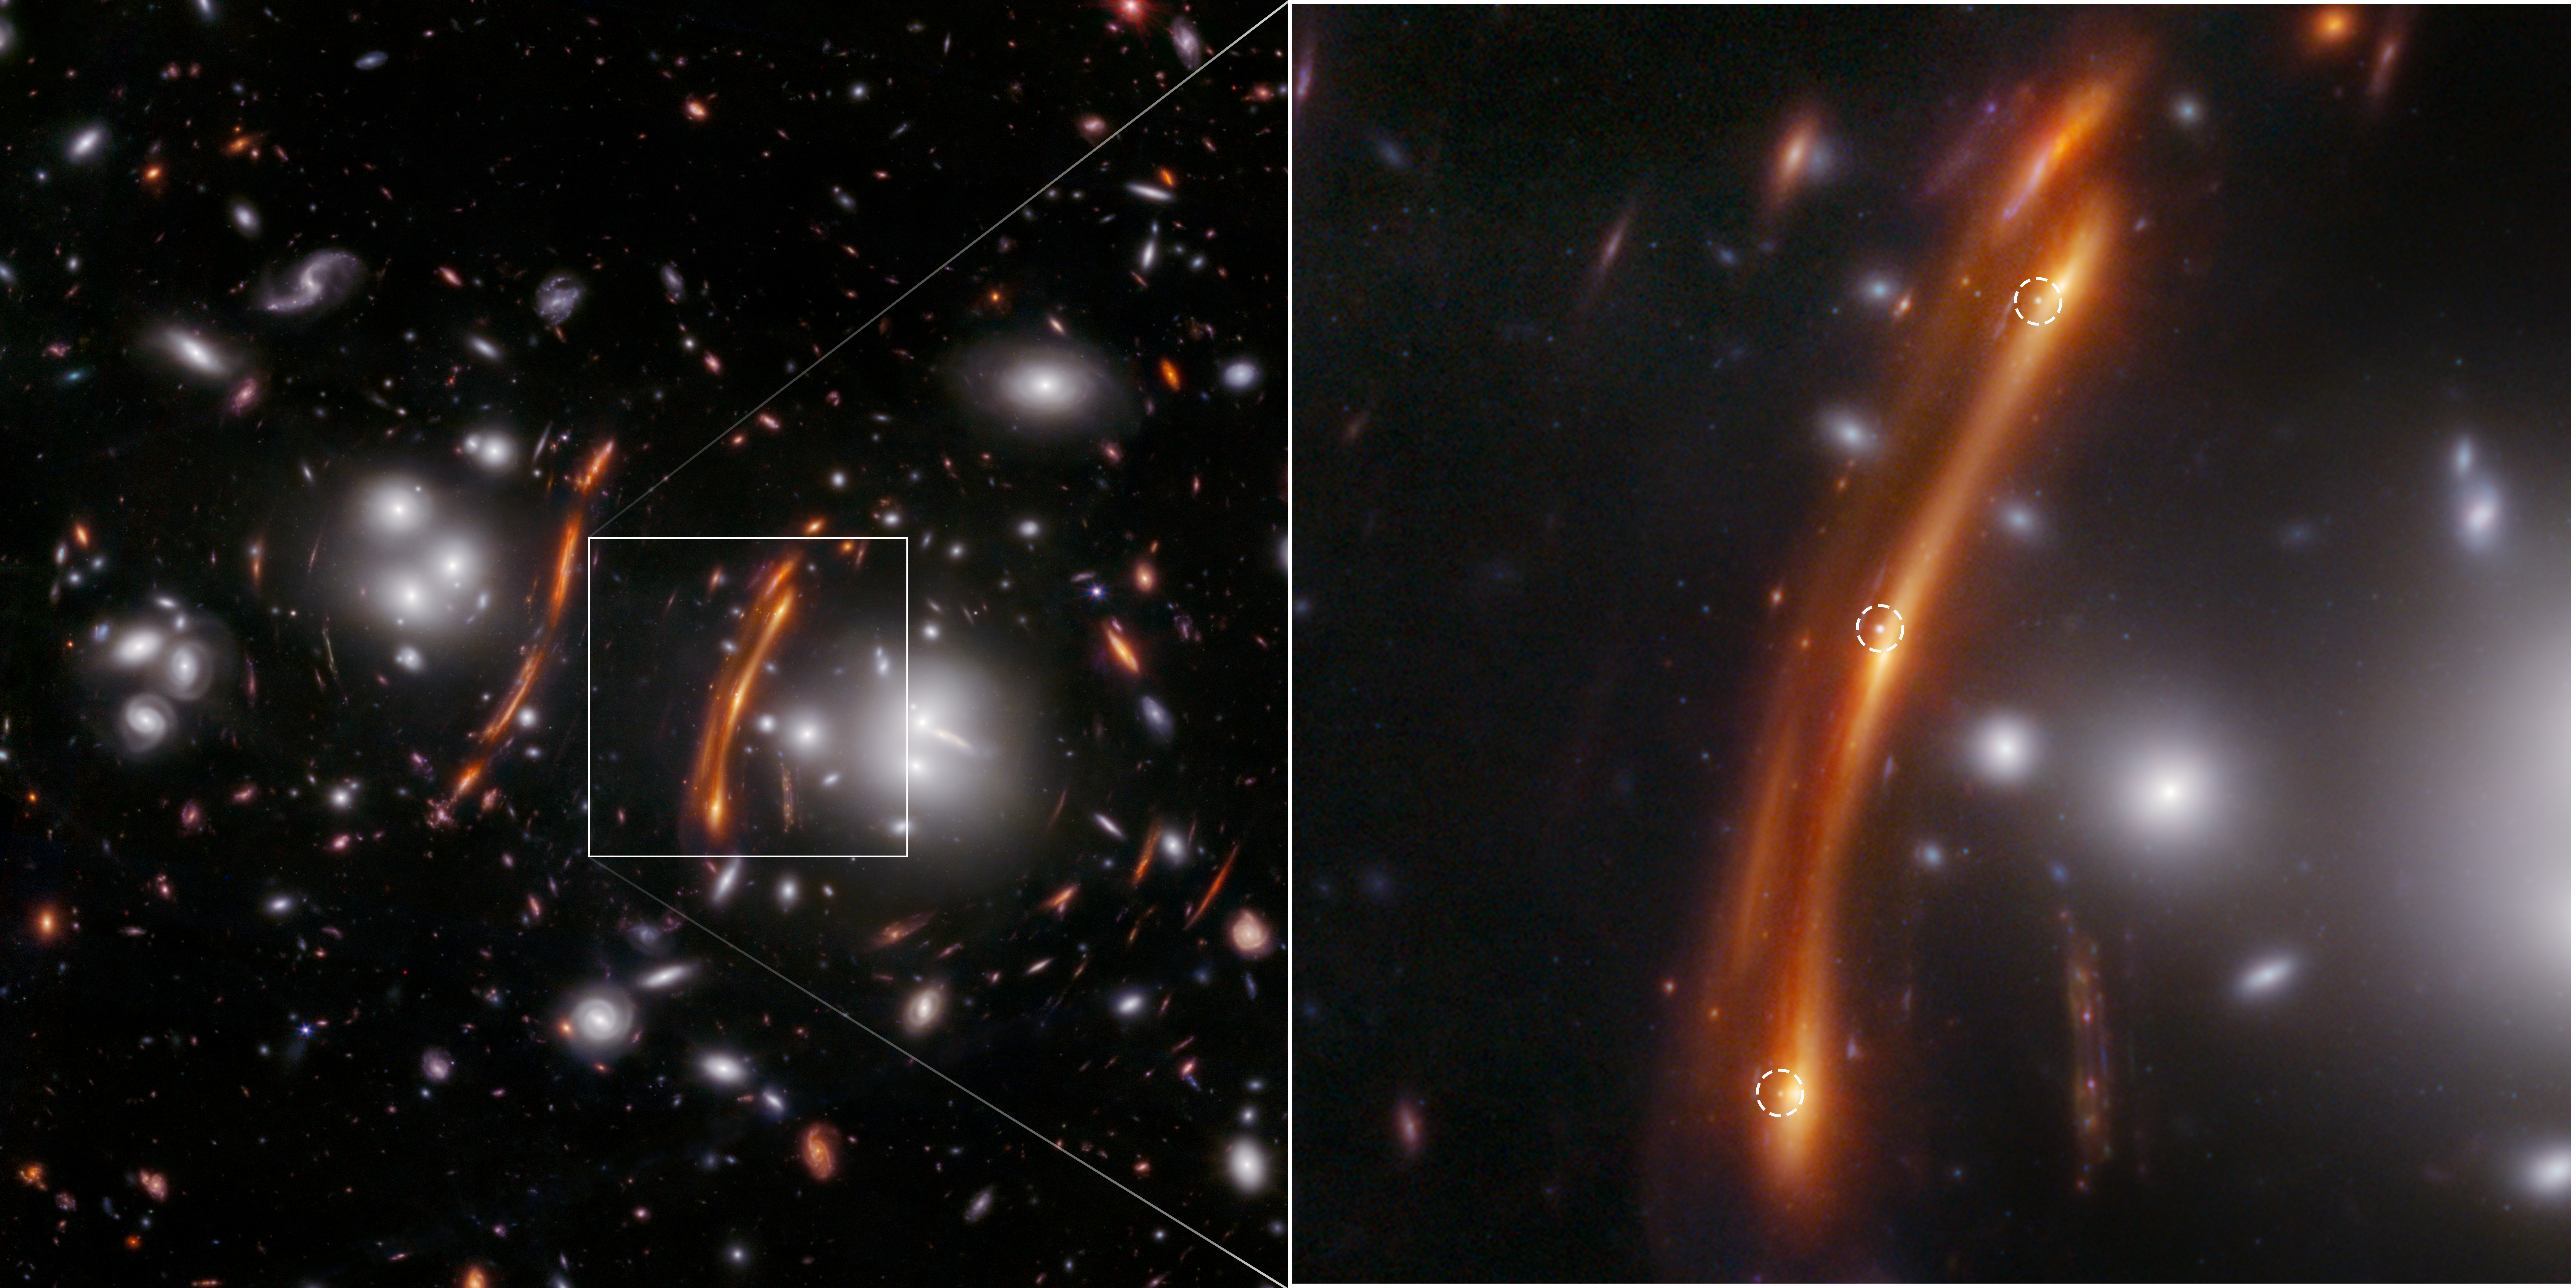

SN H0pe

Webb researchers discover lensed supernova, confirm Hubble Tension

Measuring the Hubble constant, the rate at which the Universe is expanding, is an active area of research among astronomers around the world who analyze data from both ground- and space-based observatories. The NASA/ESA/CSA James Webb Space Telescope has already contributed to this ongoing discussion. Earlier this year, astronomers used Webb data containing Cepheid variables and Type Ia supernovae, reliable distance markers to measure the Universe’s expansion rate, to confirm the NASA/ESA Hubble Space Telescope’s previous measurements.

Now, researchers are using an independent method of measurement to further improve the precision of the Hubble constant — gravitationally lensed supernovae. Researchers from different institutions around the world are leading this effort after Webb’s discovery of three points of light in the direction of a distant and densely populated cluster of galaxies.

This is an image from Webb’s NIRCam (Near-Infrared Camera) of the galaxy cluster PLCK G165.7+67.0, also known as G165, on the left shows the magnifying effect a foreground cluster can have on the distant Universe beyond. The foreground cluster is 3.6 billion light-years away from Earth. The zoomed region on the right shows the supernova H0pe triply imaged (labeled with white dashed circles) due to gravitational lensing.

This field was selected for observation due to its high rate of star formation of more than 300 solar masses per year, an attribute that correlates with higher supernova rates. SN H0pe is one of the most distant Type Ia supernovae observed to date. The measured Hubble constant value matches other measurements in the local Universe, and is somewhat in tension with values obtained when the Universe was young. Future Webb observations in Cycle 3 will improve on the uncertainties.

In this image blue represents light at 0.9, 1.15, and 1.5 microns (F090W + F115W + F150W), green is 2.0 and 2.77 microns (F200W + F277W), and red is 3.56, 4.1, and 4.44 microns (F356W + F410M + F444W).

Note: This post highlights data from Webb science in progress, which has not yet been through the peer-review process.

Credit: NASA, ESA, CSA, STScI, B. Frye (University of Arizona), R. Windhorst (Arizona State University), S. Cohen (Arizona State University), J. D’Silva (University of Western Australia, Perth), A. Koekemoer (Space Telescope Science Institute), J. Summers (Arizona State University).